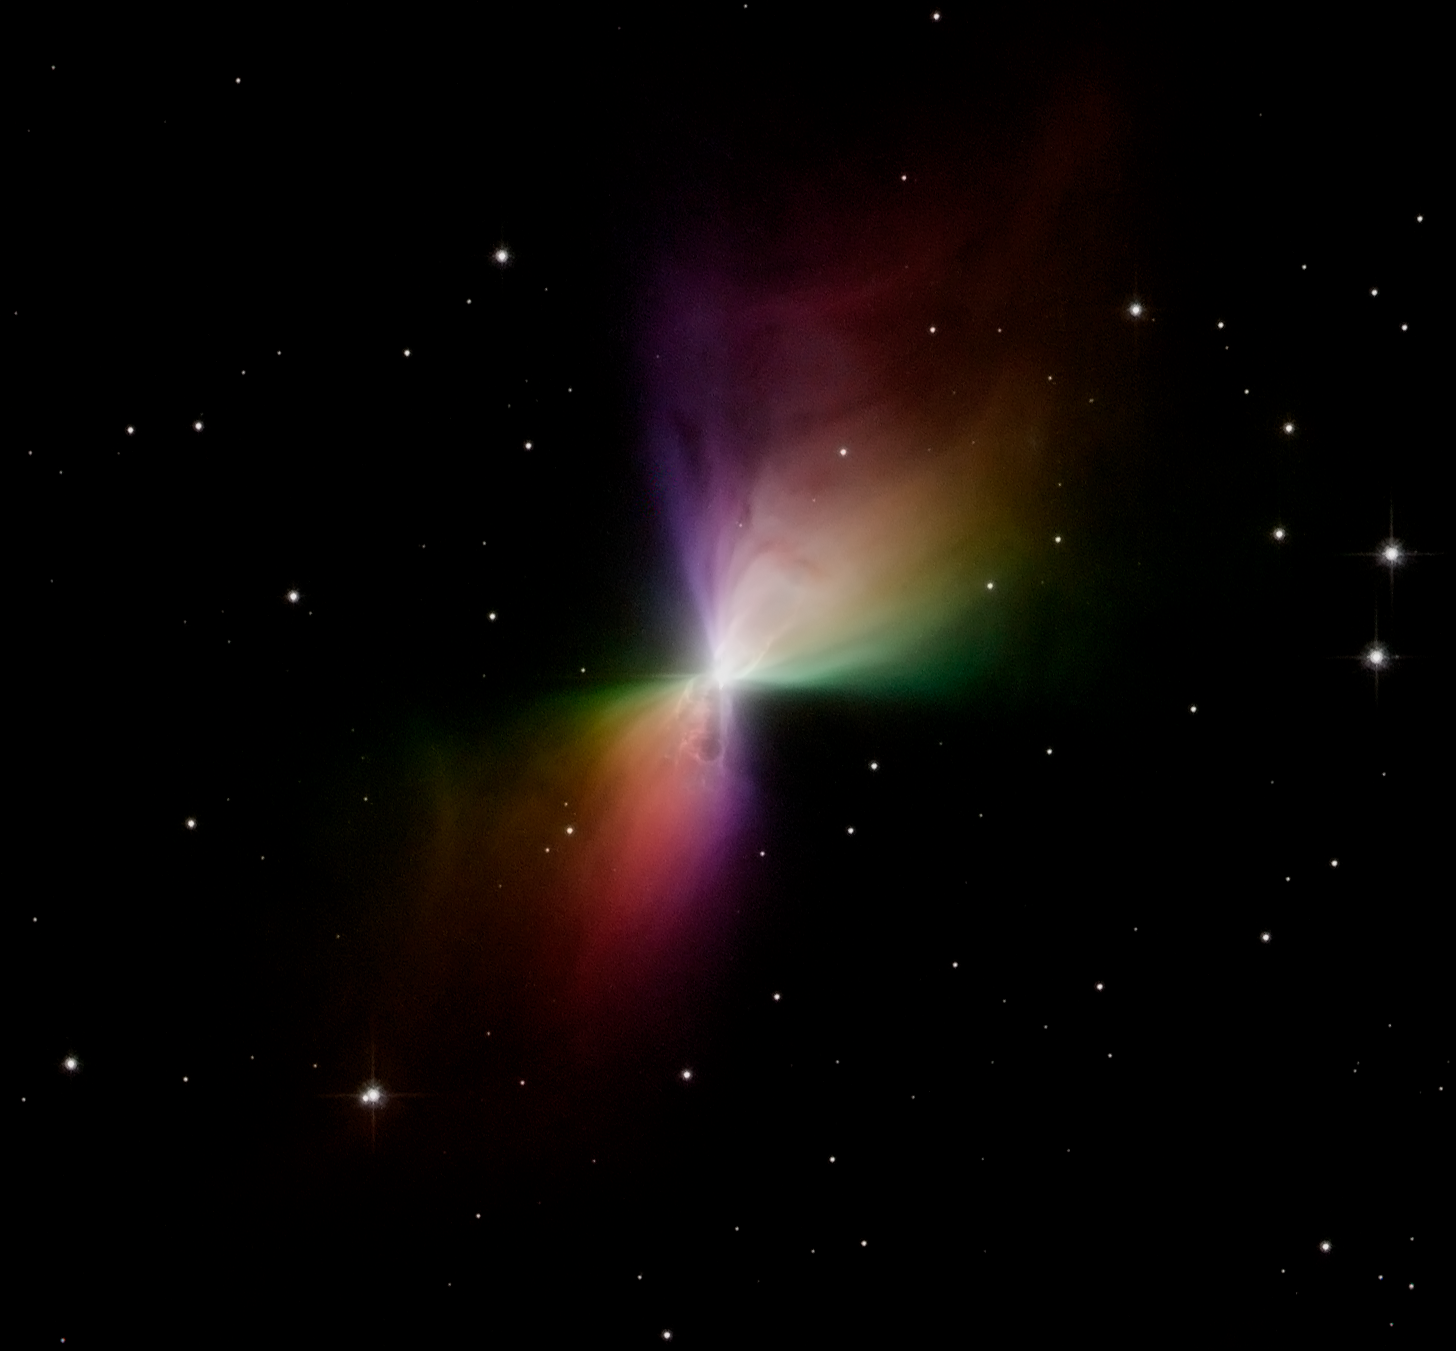

Hubble catches scattered light from the Boomerang Nebula

The NASA/ESA Hubble Space Telescope caught the Boomerang Nebula in images taken with the Advanced Camera for Surveys in early 2005. This reflecting cloud of dust and gas has two nearly symmetric lobes of matter that are being ejected from a central star. Each lobe of the nebula is nearly one light-year in length, making the total length of the nebula half as long as the distance from our Sun to our nearest neighbors - the alpha Centauri stellar system, located roughly 4 light-years away. The Boomerang Nebula resides 5,000 light-years from Earth. Hubble's sharp view is able to resolve patterns and ripples in the nebula very close to the central star that are not visible from the ground.

Credit: NASA, ESA and The Hubble Heritage Team STScI/AURA